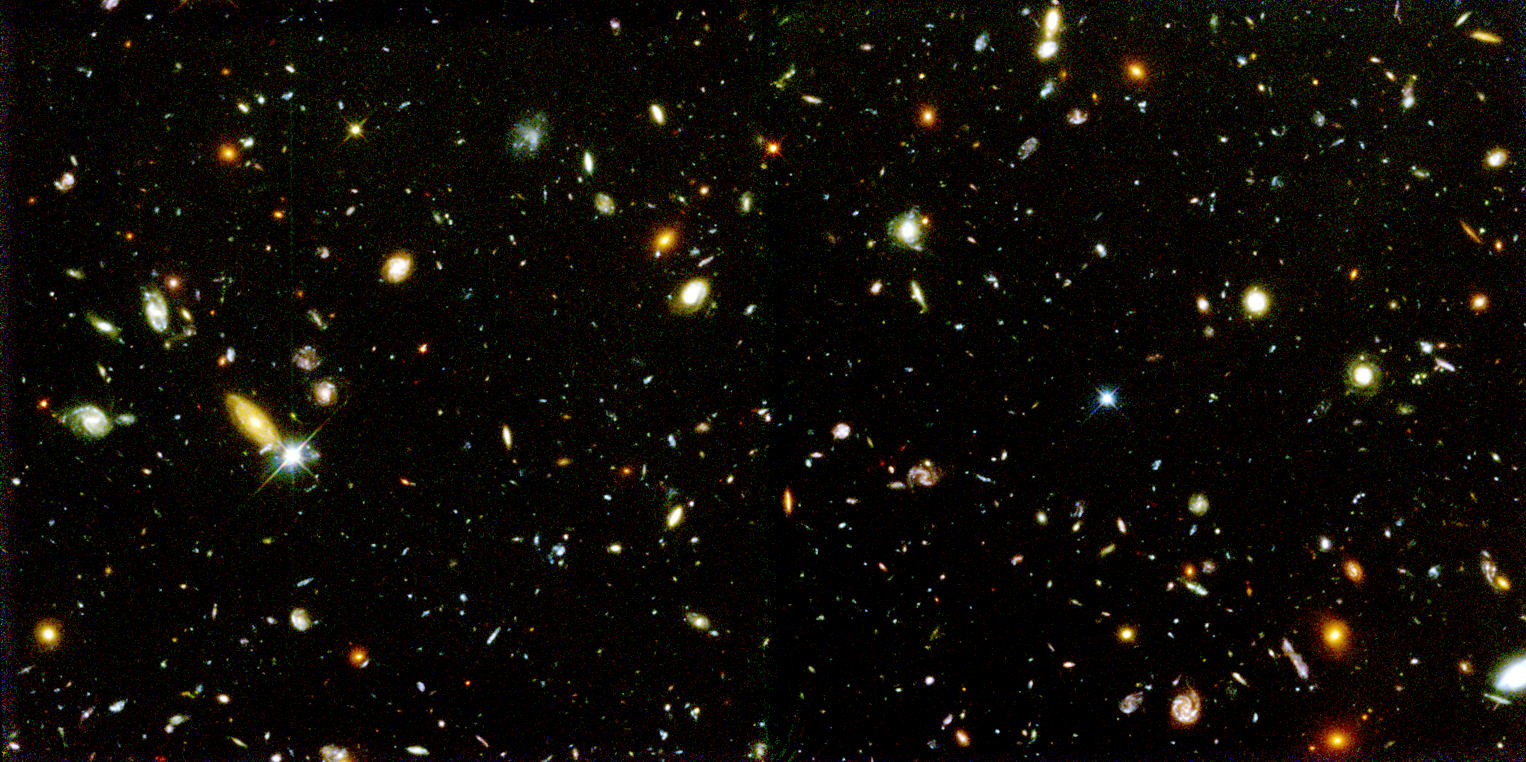

Farthest Supernova Ever - SN 1997ff

Astronomers found this supernova in 1997 during a second look at the northern Hubble Deep Field, a tiny region of sky first explored by the Hubble telescope in 1995. The image shows the myriad of galaxies Hubble spied when it peered across more than 10 billion years of time and space.

Credit: NASA/ESA, Adam Riess ( Space Telescope Science Institute, Baltimore, MD)